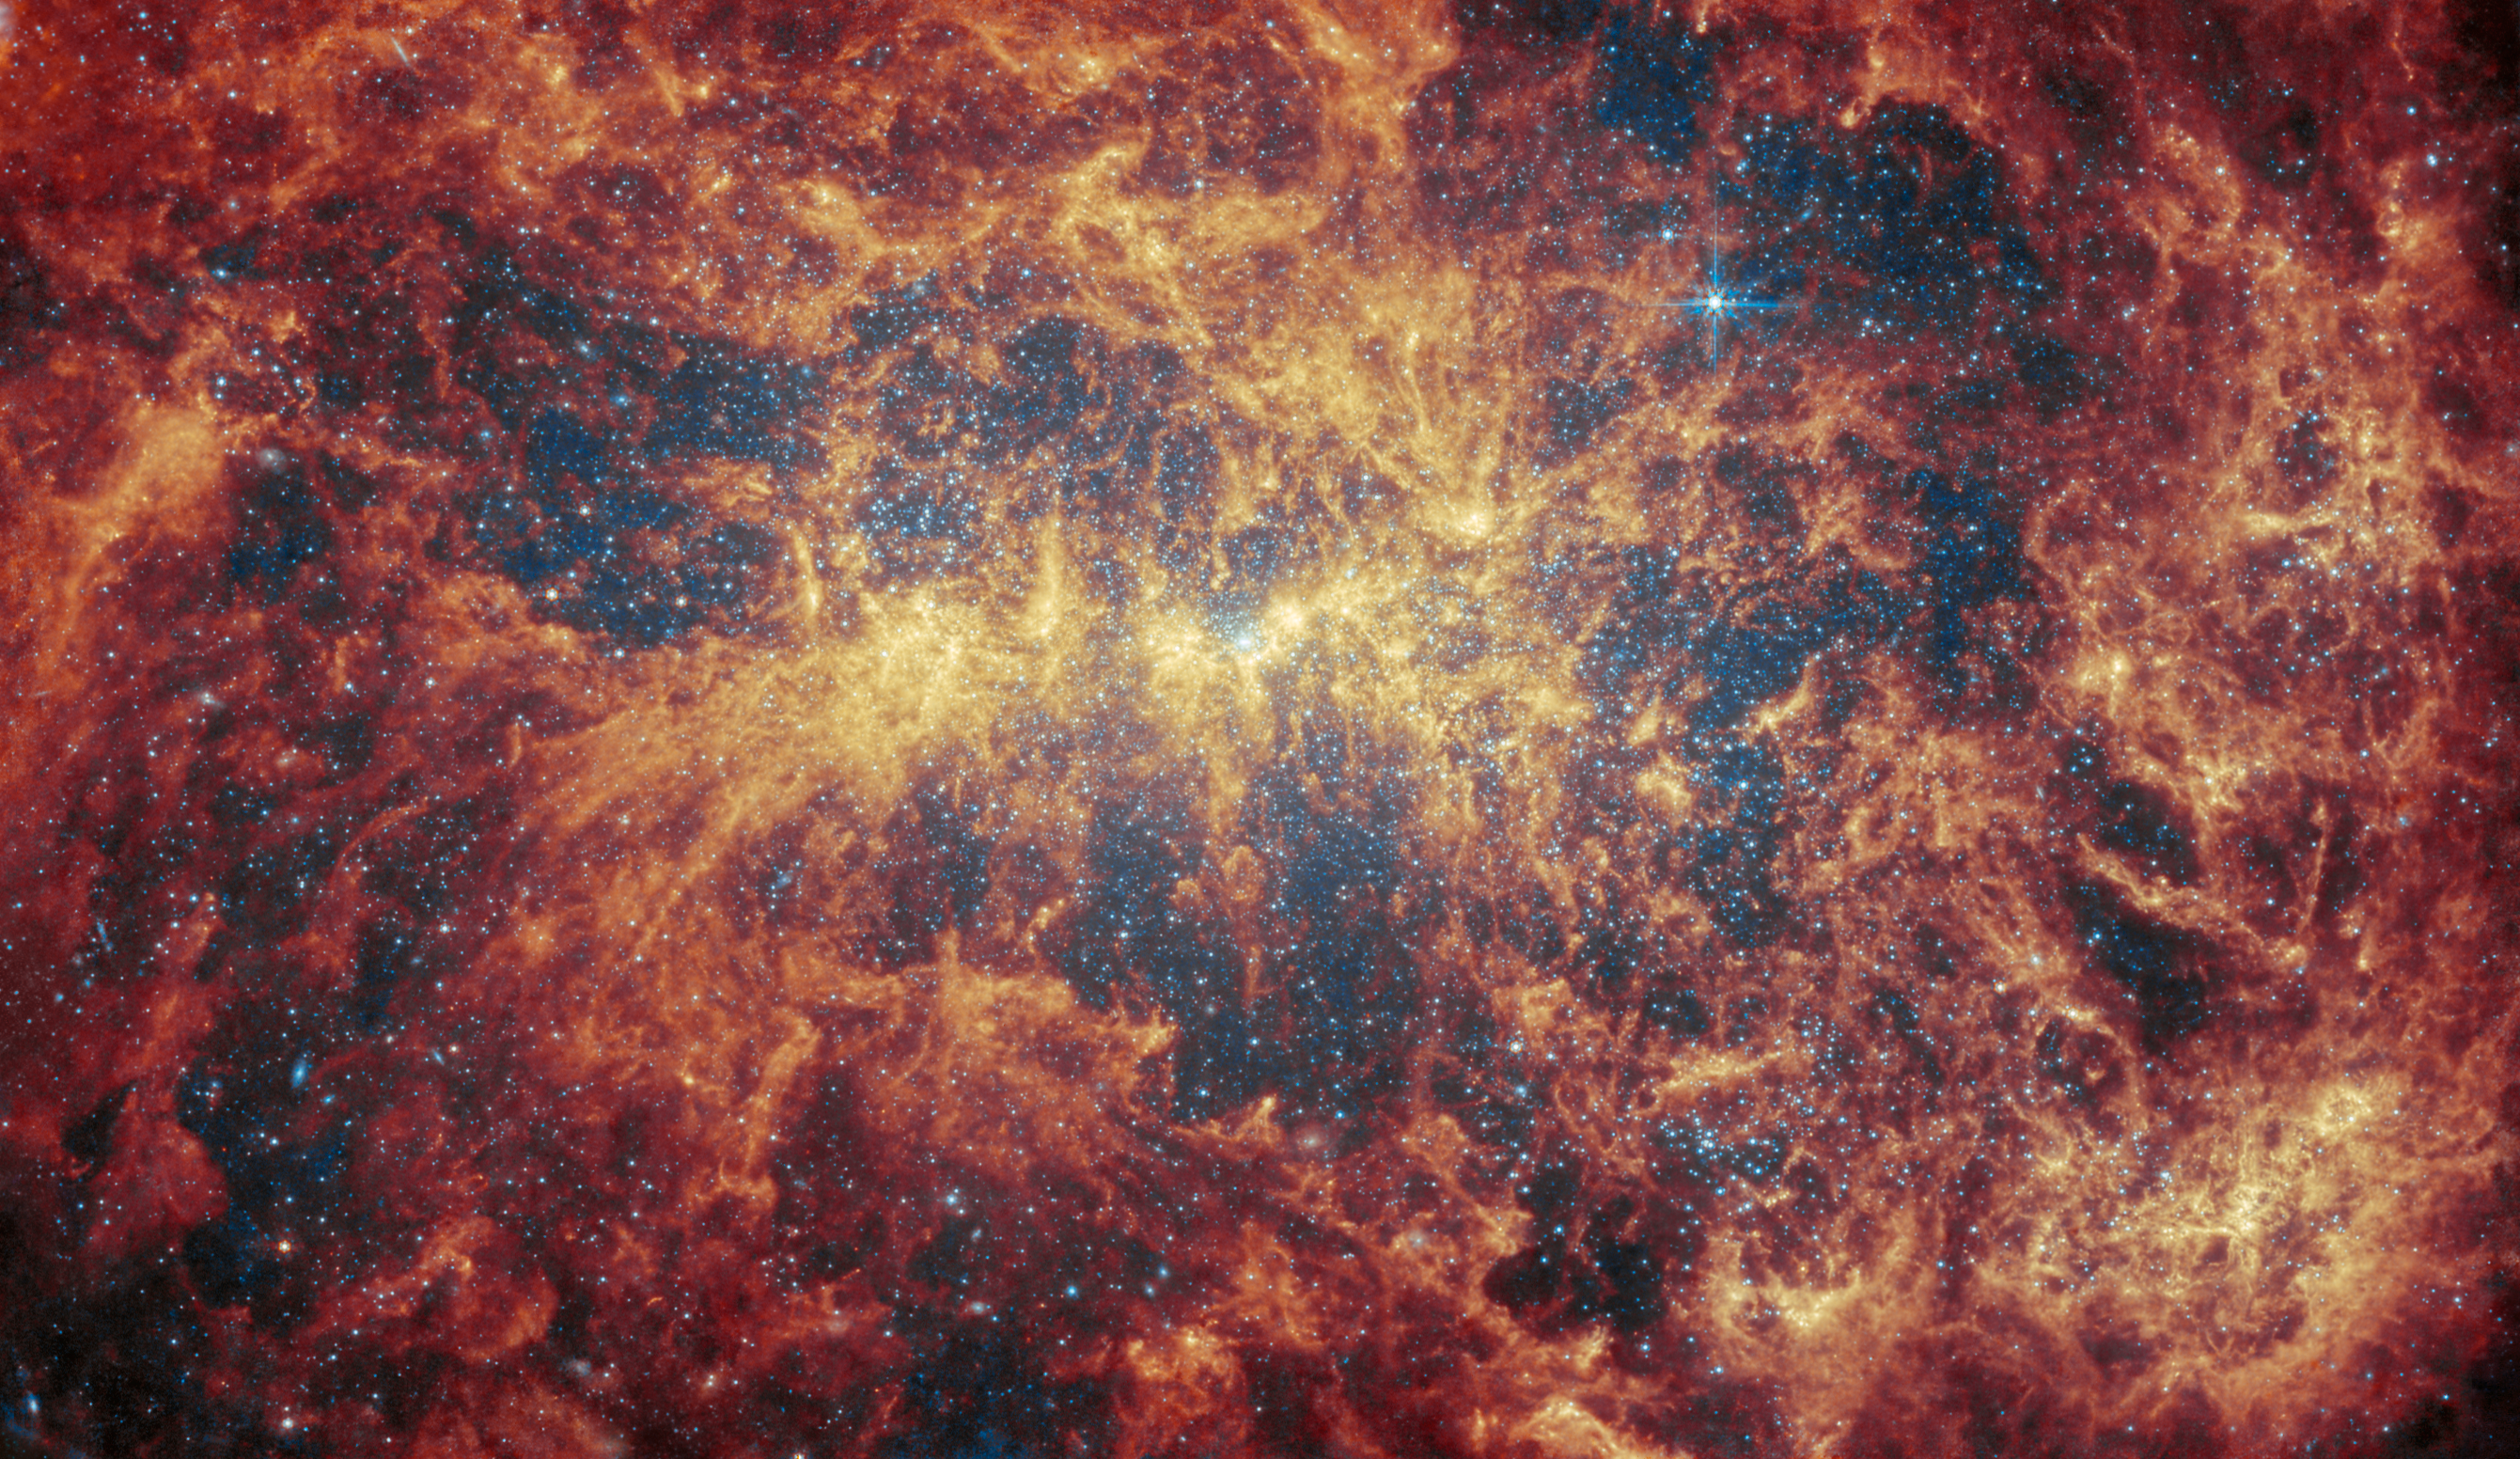

NGC 4449 (MIRI)

Featured in this new image from the NASA/ESA/CSA James Webb Space Telescope is the dwarf galaxy NGC 4449. This galaxy, also known as Caldwell 21, resides roughly 12.5 million light-years away in the constellation Canes Venatici. It is part of the M94 galaxy group, which lies close to the Local Group that hosts our Milky Way.

NGC 4449 has been forming stars for several billion years, but it is currently experiencing a period of star formation at a much higher rate than in the past. Such unusually explosive and intense star formation activity is called a starburst and for that reason NGC 4449 is known as a starburst galaxy. In fact, at the current rate of star formation, the gas supply that feeds the production of stars would only last for another billion years or so. Starbursts usually occur in the central regions of galaxies, but NGC 4449 displays more widespread star formation activity, and the very youngest stars are observed both in the nucleus and in streams surrounding the galaxy. It's likely that the current widespread starburst was triggered by interaction or merging with a smaller companion; indeed, astronomers think NGC 4449's star formation has been influenced by interactions with several of its neighbours.

NGC 4449 resembles primordial star-forming galaxies which grew by merging with and accreting smaller stellar systems. Since NGC 4449 is close enough to be observed in great detail, it is the ideal laboratory for astronomers to study what may have occurred during galaxy formation and evolution in the early Universe.

This image was captured with Webb’s MIRI, or the Mid-InfraRed Instrument, makes observations in the mid-infrared, which spans wavelengths of light very different from visible light the wavelengths that human eyes are sensitive to, which extend from about 0.38 to 0.75 micrometres (a micrometre, or micron, is one thousandth of a millimetre). By contrast, MIRI detects light between 5 and 28 micrometres. However, it does not typically observe across this entire wavelength range all at once. Instead, MIRI has a set of ten filters that allow very specific regions of light through. For example, one of MIRI’s filters used in this image (named F770W), allows light with wavelengths from 6.581 to 8.687 micrometres to pass through it.

This MIRI image reveals the galaxy’s creeping tendrils of gas, dust and stars. The bright blue spots reveal countless individual stars, while the bright yellow regions that weave throughout the galaxy indicate concentrations of active stellar nurseries, where new stars are forming. The orange-red areas indicate the distribution of a type of carbon-based compounds known as polycyclic aromatic hydrocarbons (or PAHs) — the F770W filter is particularly suited to imaging these important molecules.

Credit: ESA/Webb, NASA & CSA, A. Adamo (Stockholm University) and the FEAST JWST team